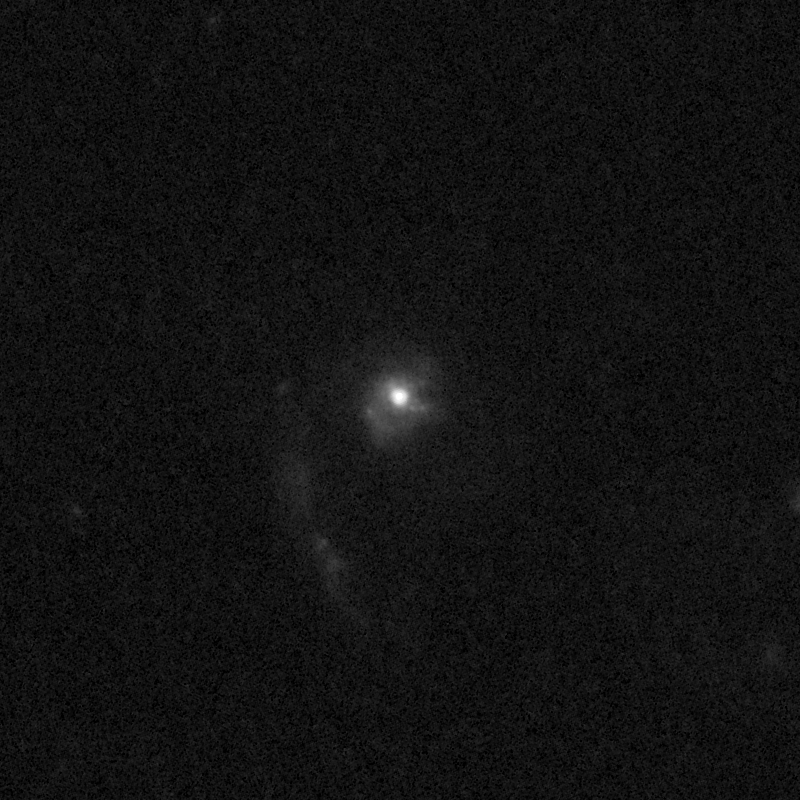

Outflows from merging galaxy J0826+4305

This NASA/ESA Hubble Space Telescope image of the galaxy J0826+4305 shows it is undergoing a firestorm of star birth, as shown by its bright white cores.

This star-making frenzy was ignited by mergers with other galaxies. The odd shape of the galaxy is telltale evidence of a close encounters.

The new Hubble Wide Field Camera 3 observations of this and eleven other galaxies undergoing the same process suggest that energy from the star-birthing frenzies created powerful winds that are blowing out the gas, meaning it is not available to form future generations of stars.

This activity occurred when the Universe was half its current age of 13.7 billion years. The gas-poor galaxies may eventually become so-called red and dead galaxies, composed only of aging stars.

This Hubble false-colour image was processed to bring out important details in the galaxy. The images were taken in 2010.

Credit: NASA, ESA, and P. Sell (Texas Tech University)